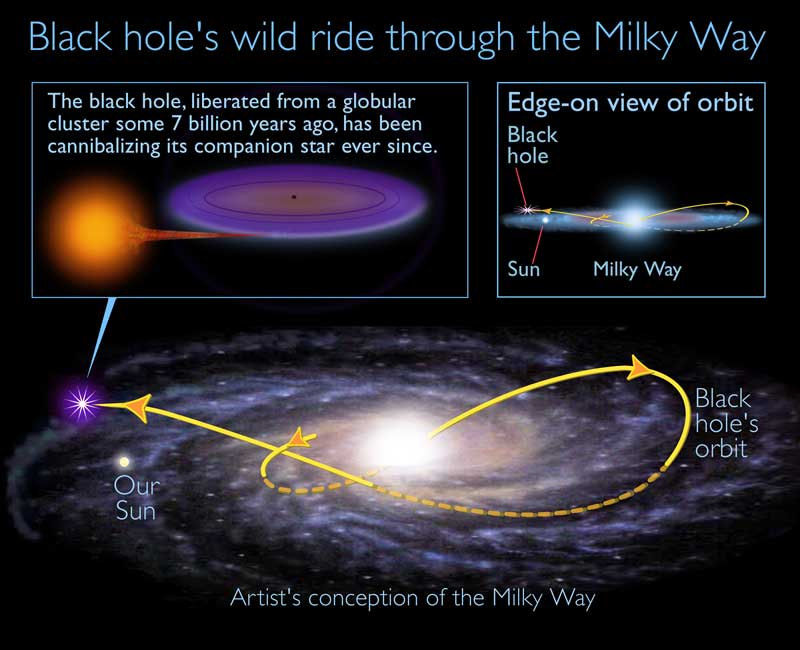

Ancient black hole speeds through Sun's galactic neighborhood, devouring companion star

Data from the Digitized Sky Survey has played an important supporting role in the discovery of an ancient black hole speeding through the Sun's galactic neighborhood, devouring a small companion star as the pair travels in an eccentric orbit looping to the outer reaches of our Milky Way galaxy. This artist's impression illustrates the dramatic journey.

Credit: A. Feild (STScI)